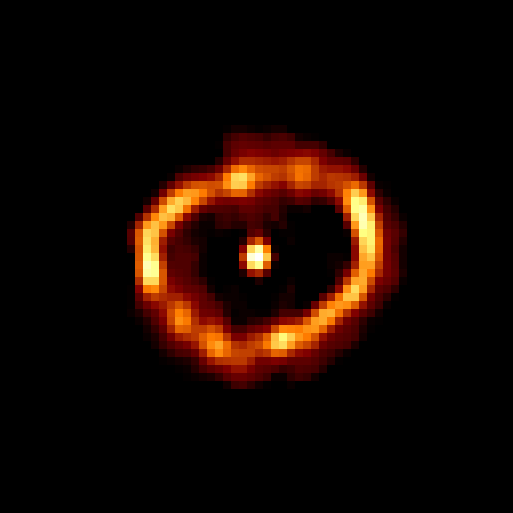

Nova Cygni 1992

This new HST image reveals an elliptical and slightly lumpy ring-like structure. The ring is the edge of a bubble of hot gas blasted into space by the nova. The shell is so thin that the FOC does not resolve its true thickness, even with HST's restored vision.

Credit: F. Paresce, R. Jedrzejewski (STScI) NASA/ESA